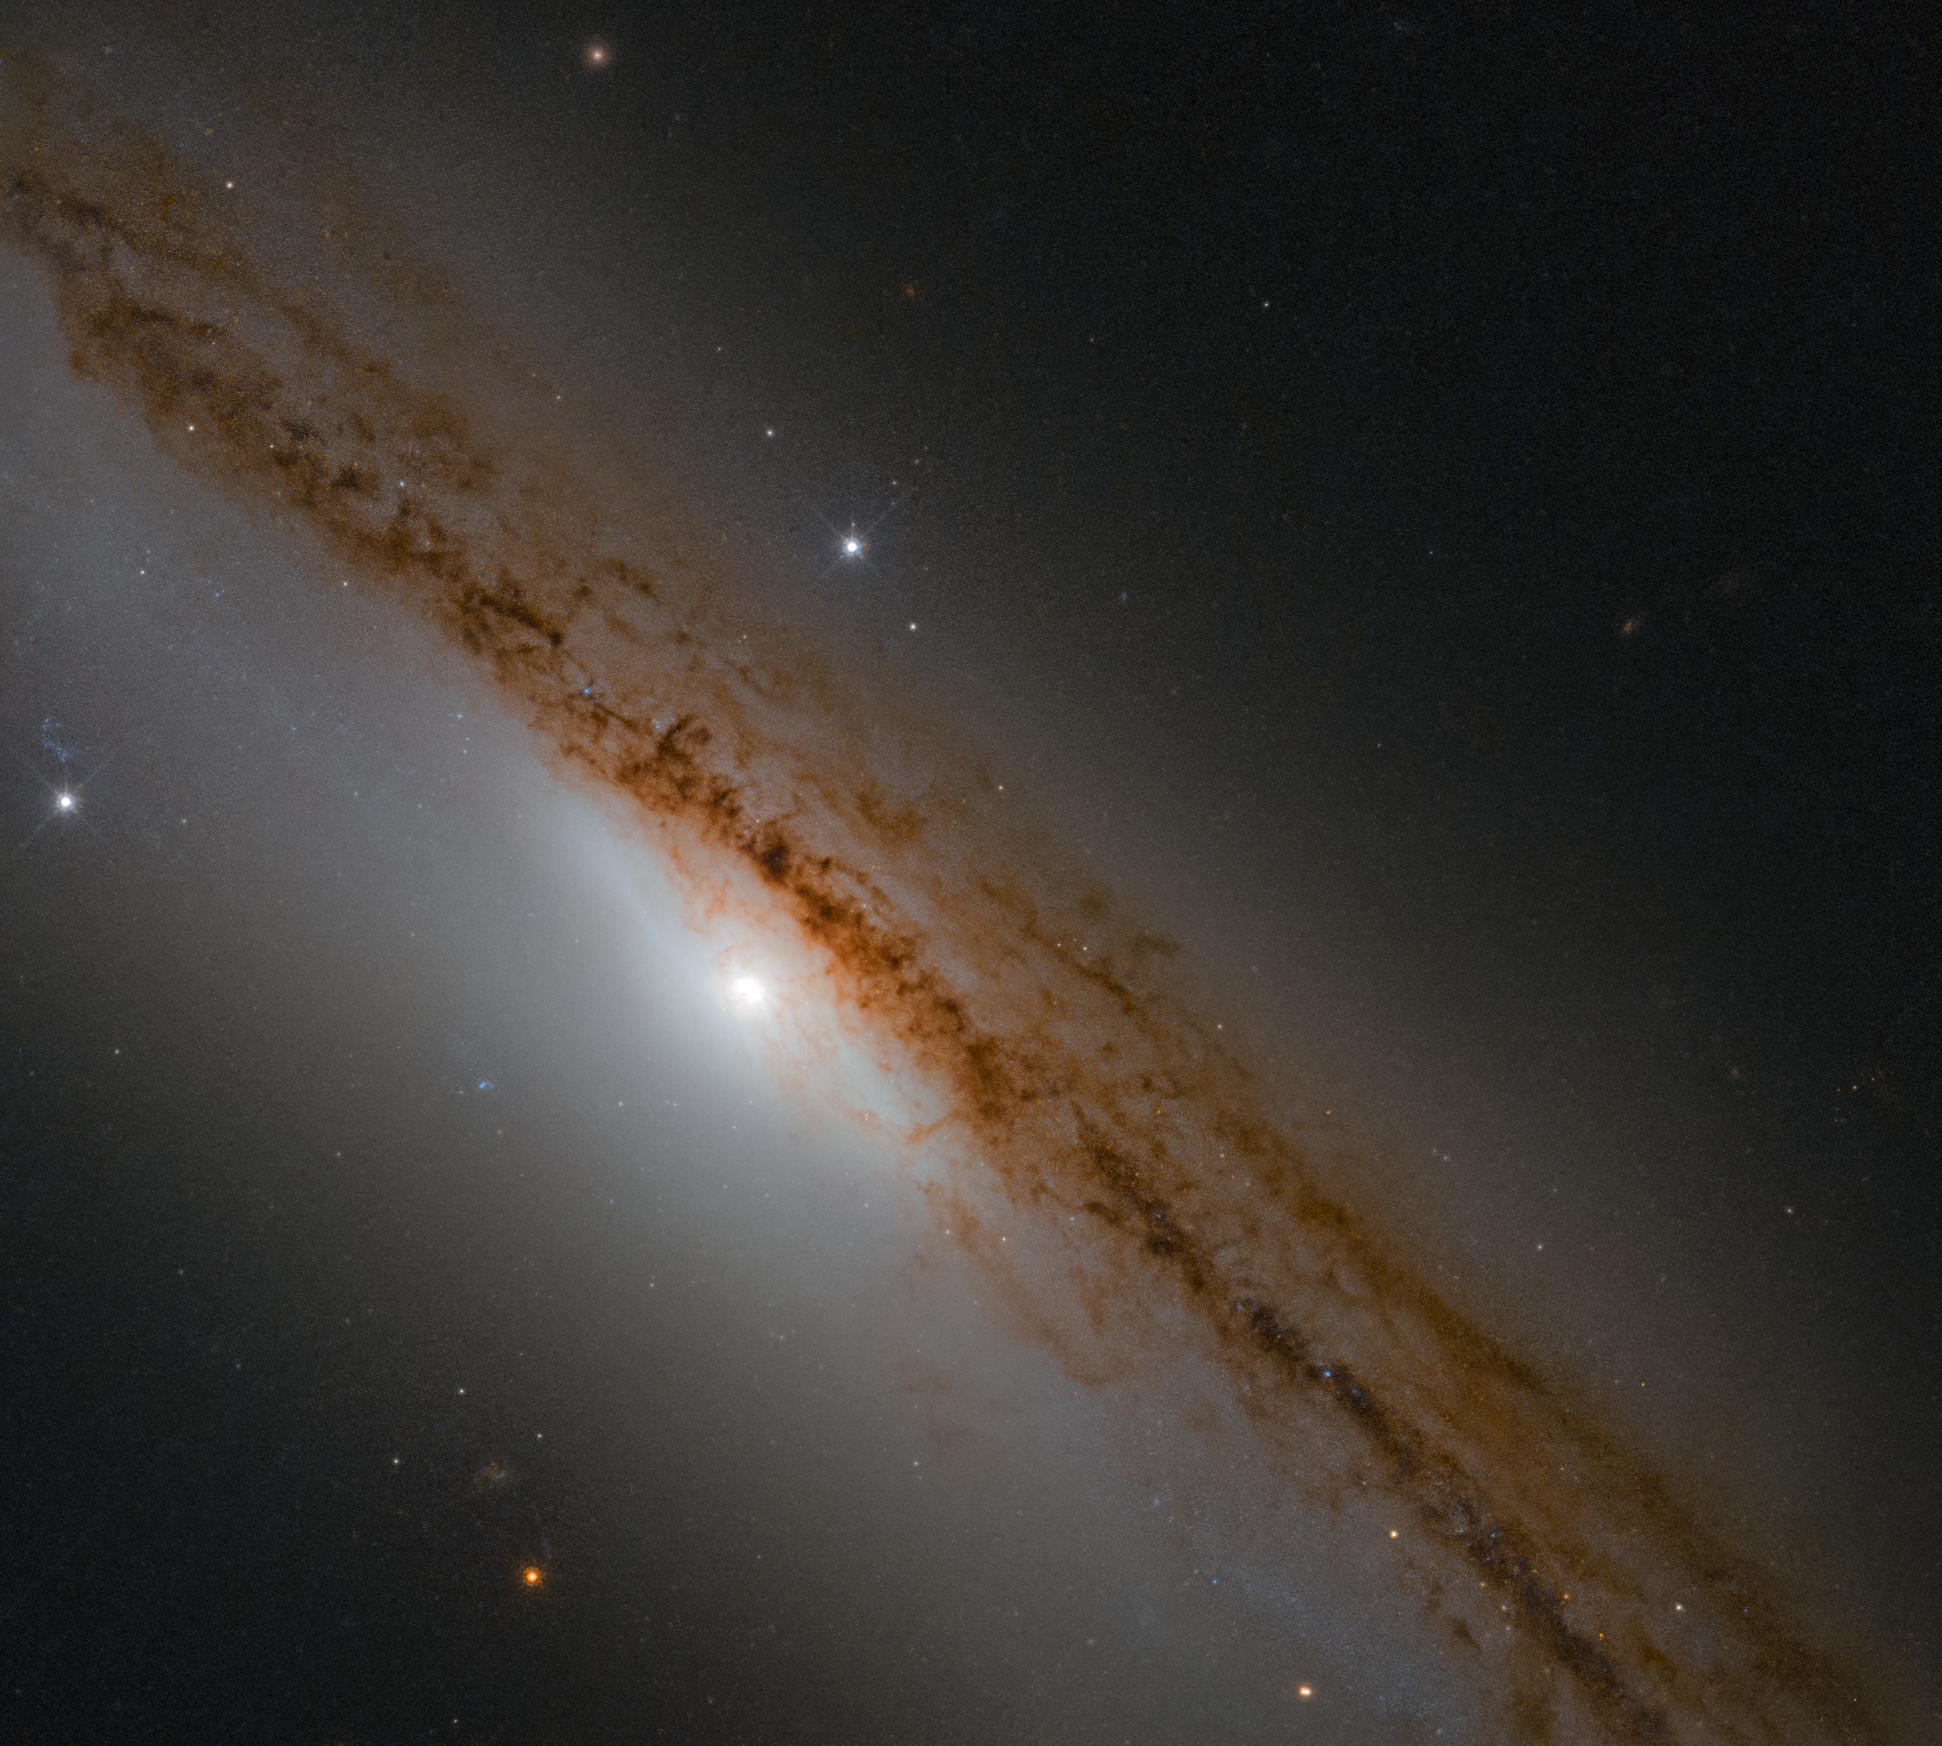

Hunger Pangs

The subject of this Picture of the Week, a spiral galaxy named NGC 1589, was once the scene of a violent bout of cosmic hunger pangs; as astronomers looked on, a poor, hapless star was torn apart and devoured by the ravenous supermassive black hole at the centre of the galaxy.

The astronomers are now using the NASA/ESA Hubble Space Telescope to test this interpretation. Hubble has observed such events before so the scientists are confident that Hubble will be able to provide smoking gun evidence in the form of stellar debris that was ejected during the disruption event.

Credit: ESA/Hubble & NASA